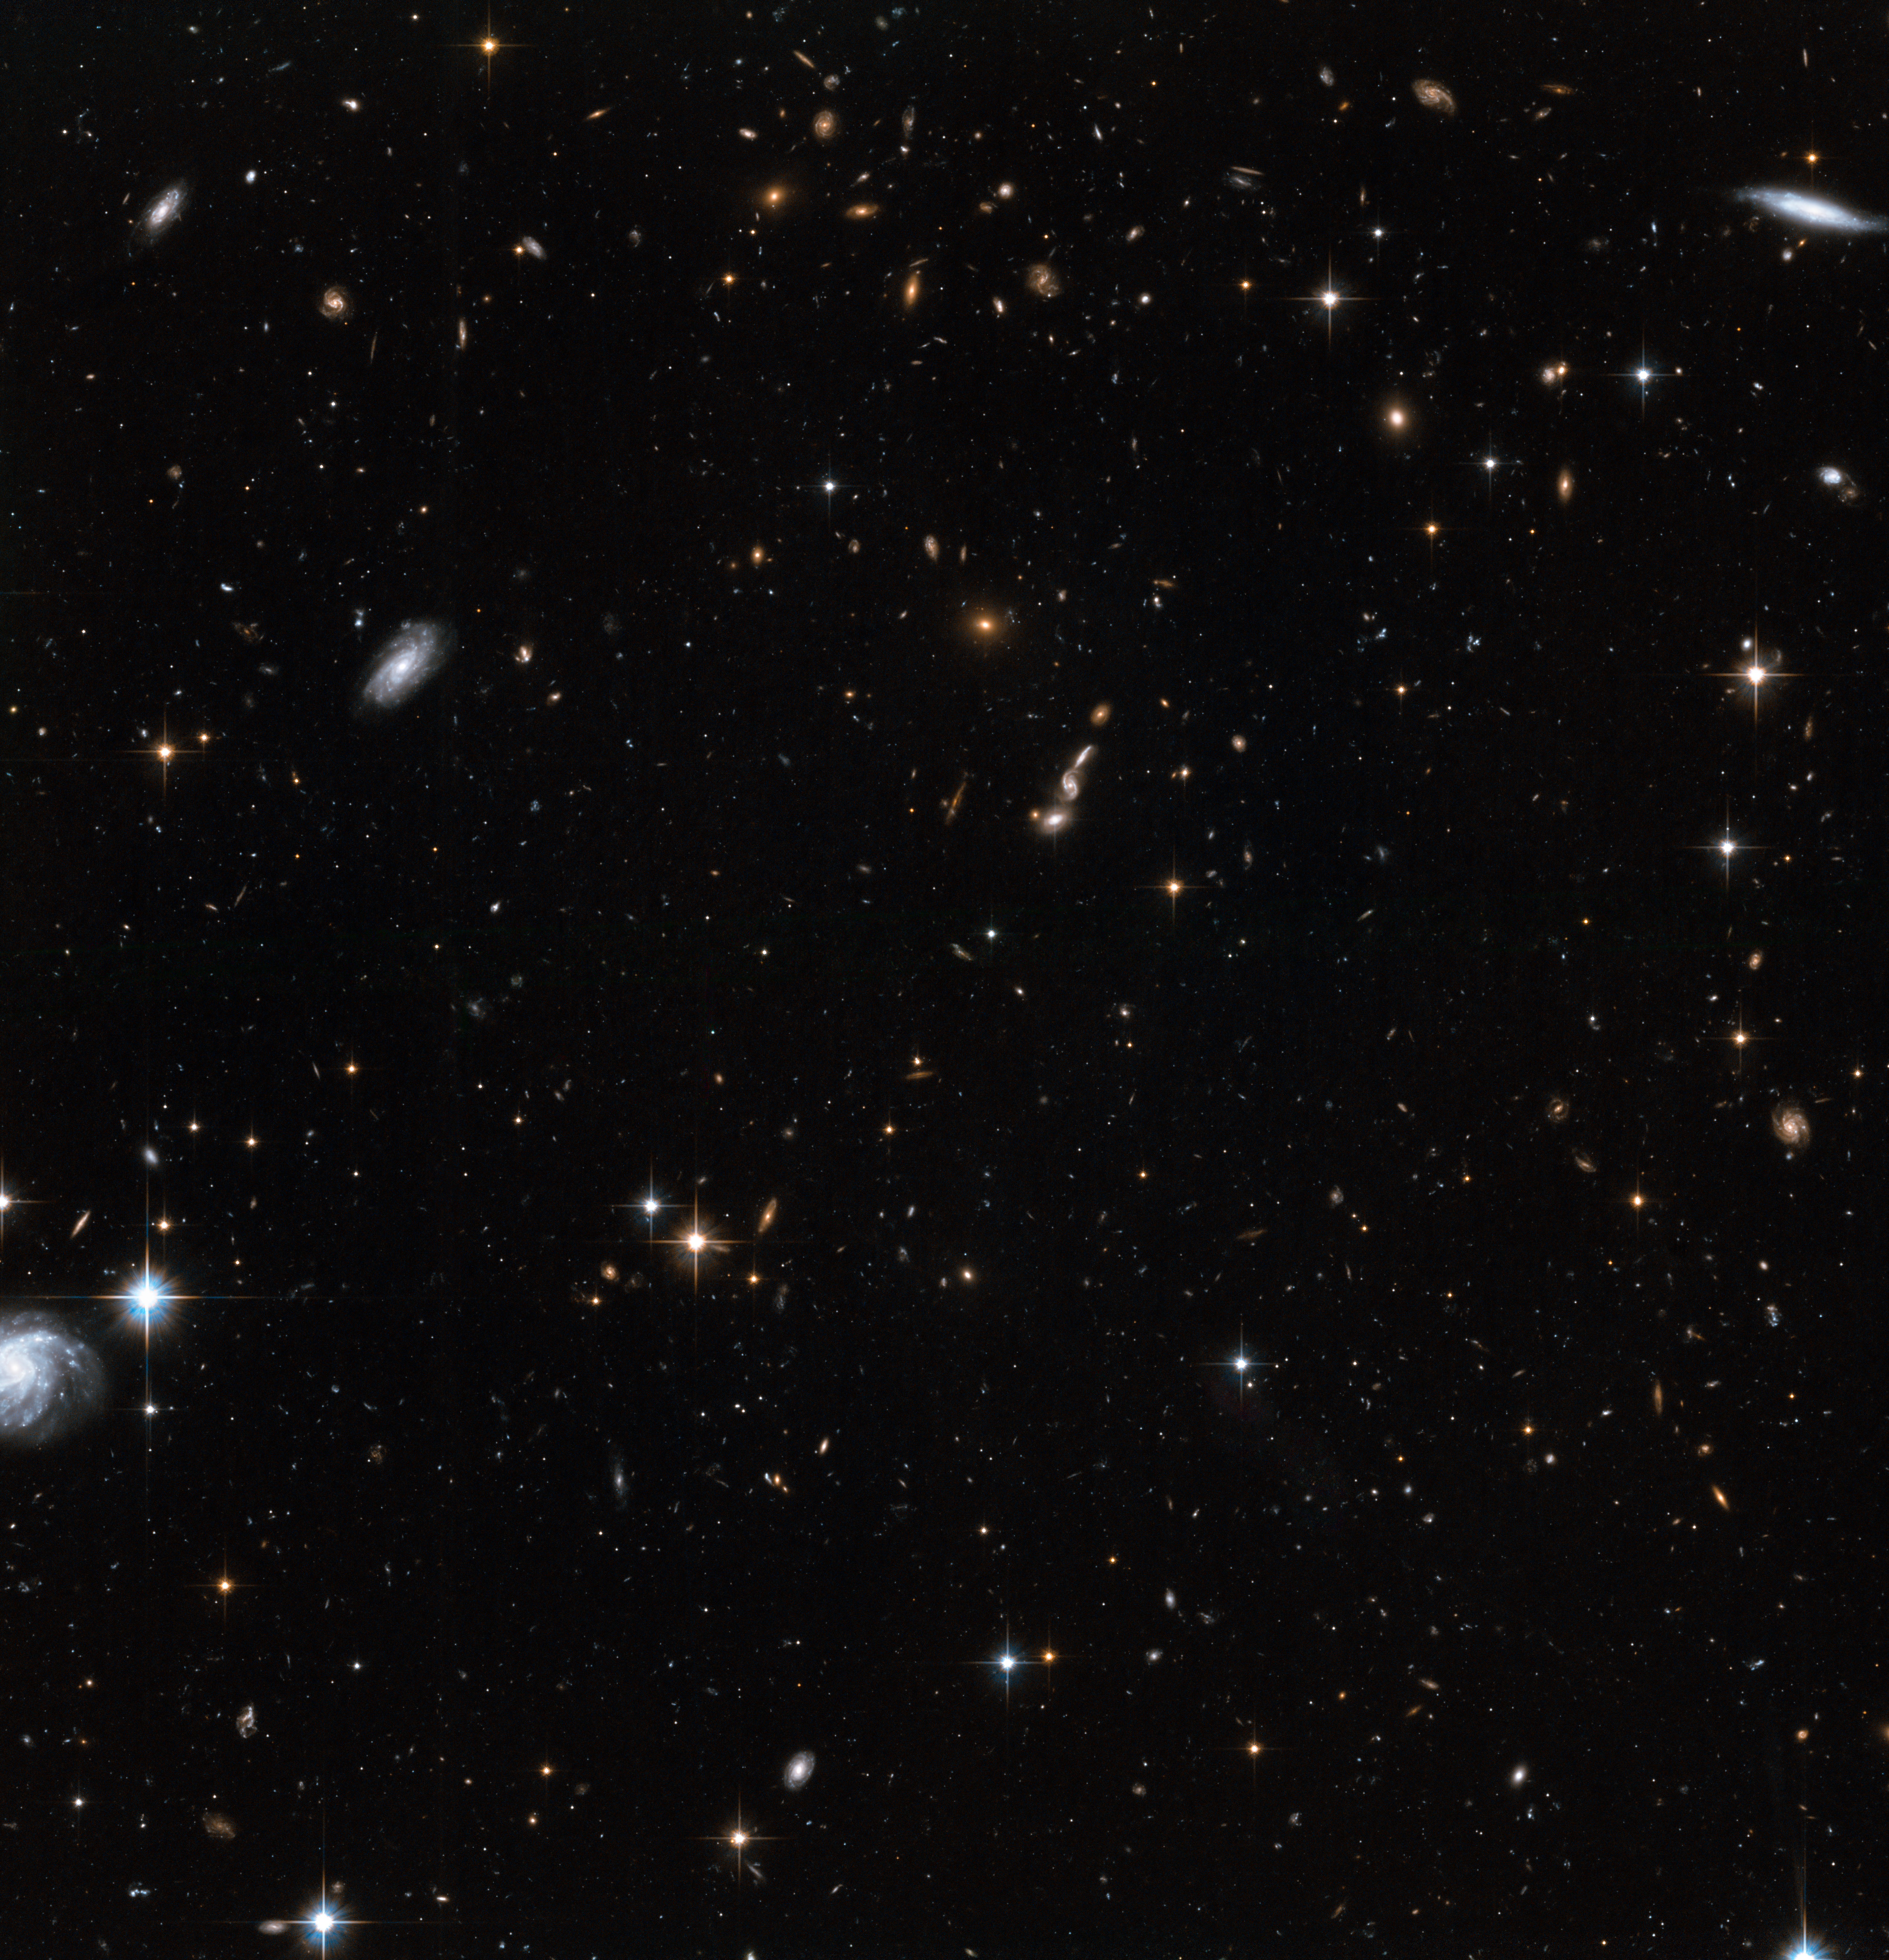

Stars in the Andromeda Galaxy’s halo with background galaxies (2)

This image shows NASA/ESA Hubble Space Telescope images of a small part of the halo of the Andromeda Galaxy. The halo is the huge and sparse sphere of stars that surrounds a galaxy. While there are relatively few stars in a galaxy’s halo, studies of the rotation rate of galaxies suggest that there is a great deal of invisible dark matter here.

Hubble’s position above the distorting effect of the atmosphere, combined with the galaxy’s relative proximity, means that this image can be resolved into individual stars, rather than the cloudy white wisps usually seen in observations of galaxies. In the background, many faraway galaxies are visible, billions of light-years further away than the Andromeda Galaxy.

These observations were made in order to observe a wide variety of stars in Andromeda, ranging from faint main sequence stars like our own Sun, to the much brighter RR Lyrae stars, which are a type of variable star. With these measurements, astronomers can determine the chemistry and ages of the stars in each part of the Andromeda Galaxy.

Credit: NASA, ESA and T.M. Brown (STScI)